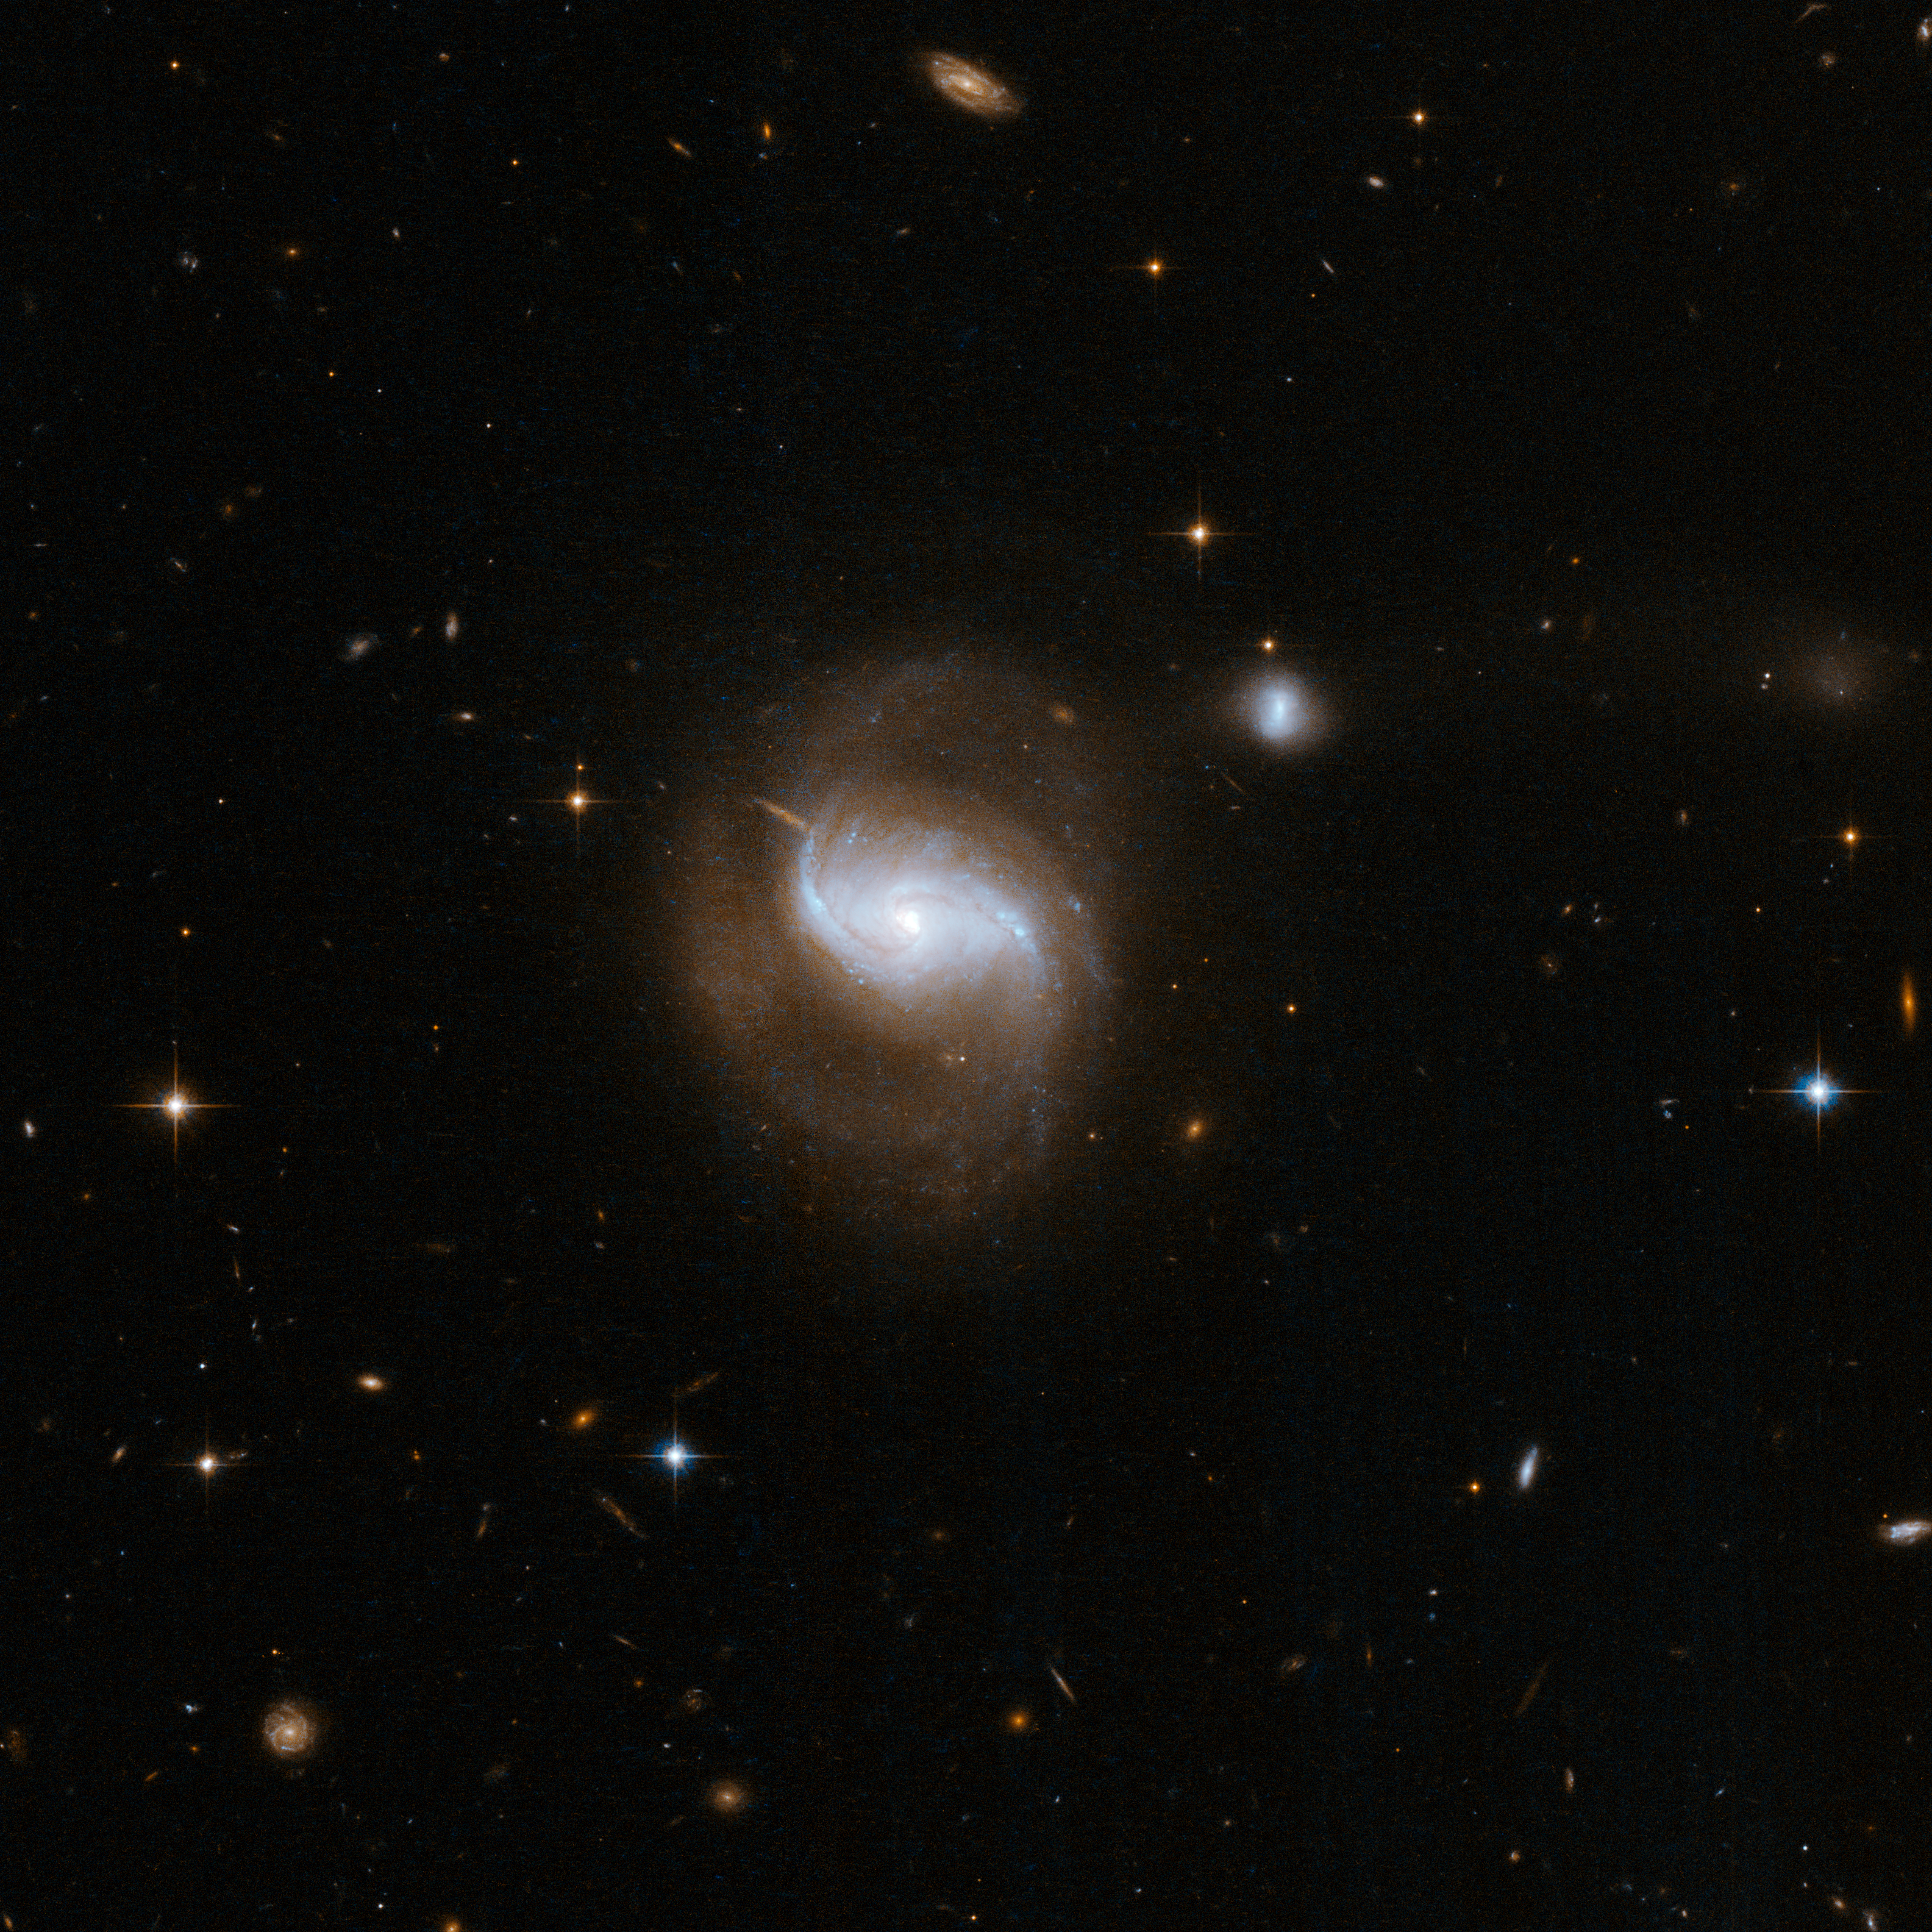

IC 5298

This is a beautiful face-on spiral galaxy with two long arms extending from the central bulge and curving back amongst the scattered stars, gas and dust. A nearby smaller companion is linked by a bridge of matter to the principal galaxy in an interaction reminiscent of the famous Whirlpool Galaxy, M51. There is also a third faint, irregular galaxy, visible at the top of the image that is also linked by a bridge of matter and probably involved in the interaction.

This image is part of a large collection of 59 images of merging galaxies taken by the Hubble Space Telescope and released on the occasion of its 18th anniversary on 24th April 2008.

Credit: NASA, ESA, the Hubble Heritage Team (STScI/AURA)-ESA/Hubble Collaboration and A. Evans (University of Virginia, Charlottesville/NRAO/Stony Brook University)